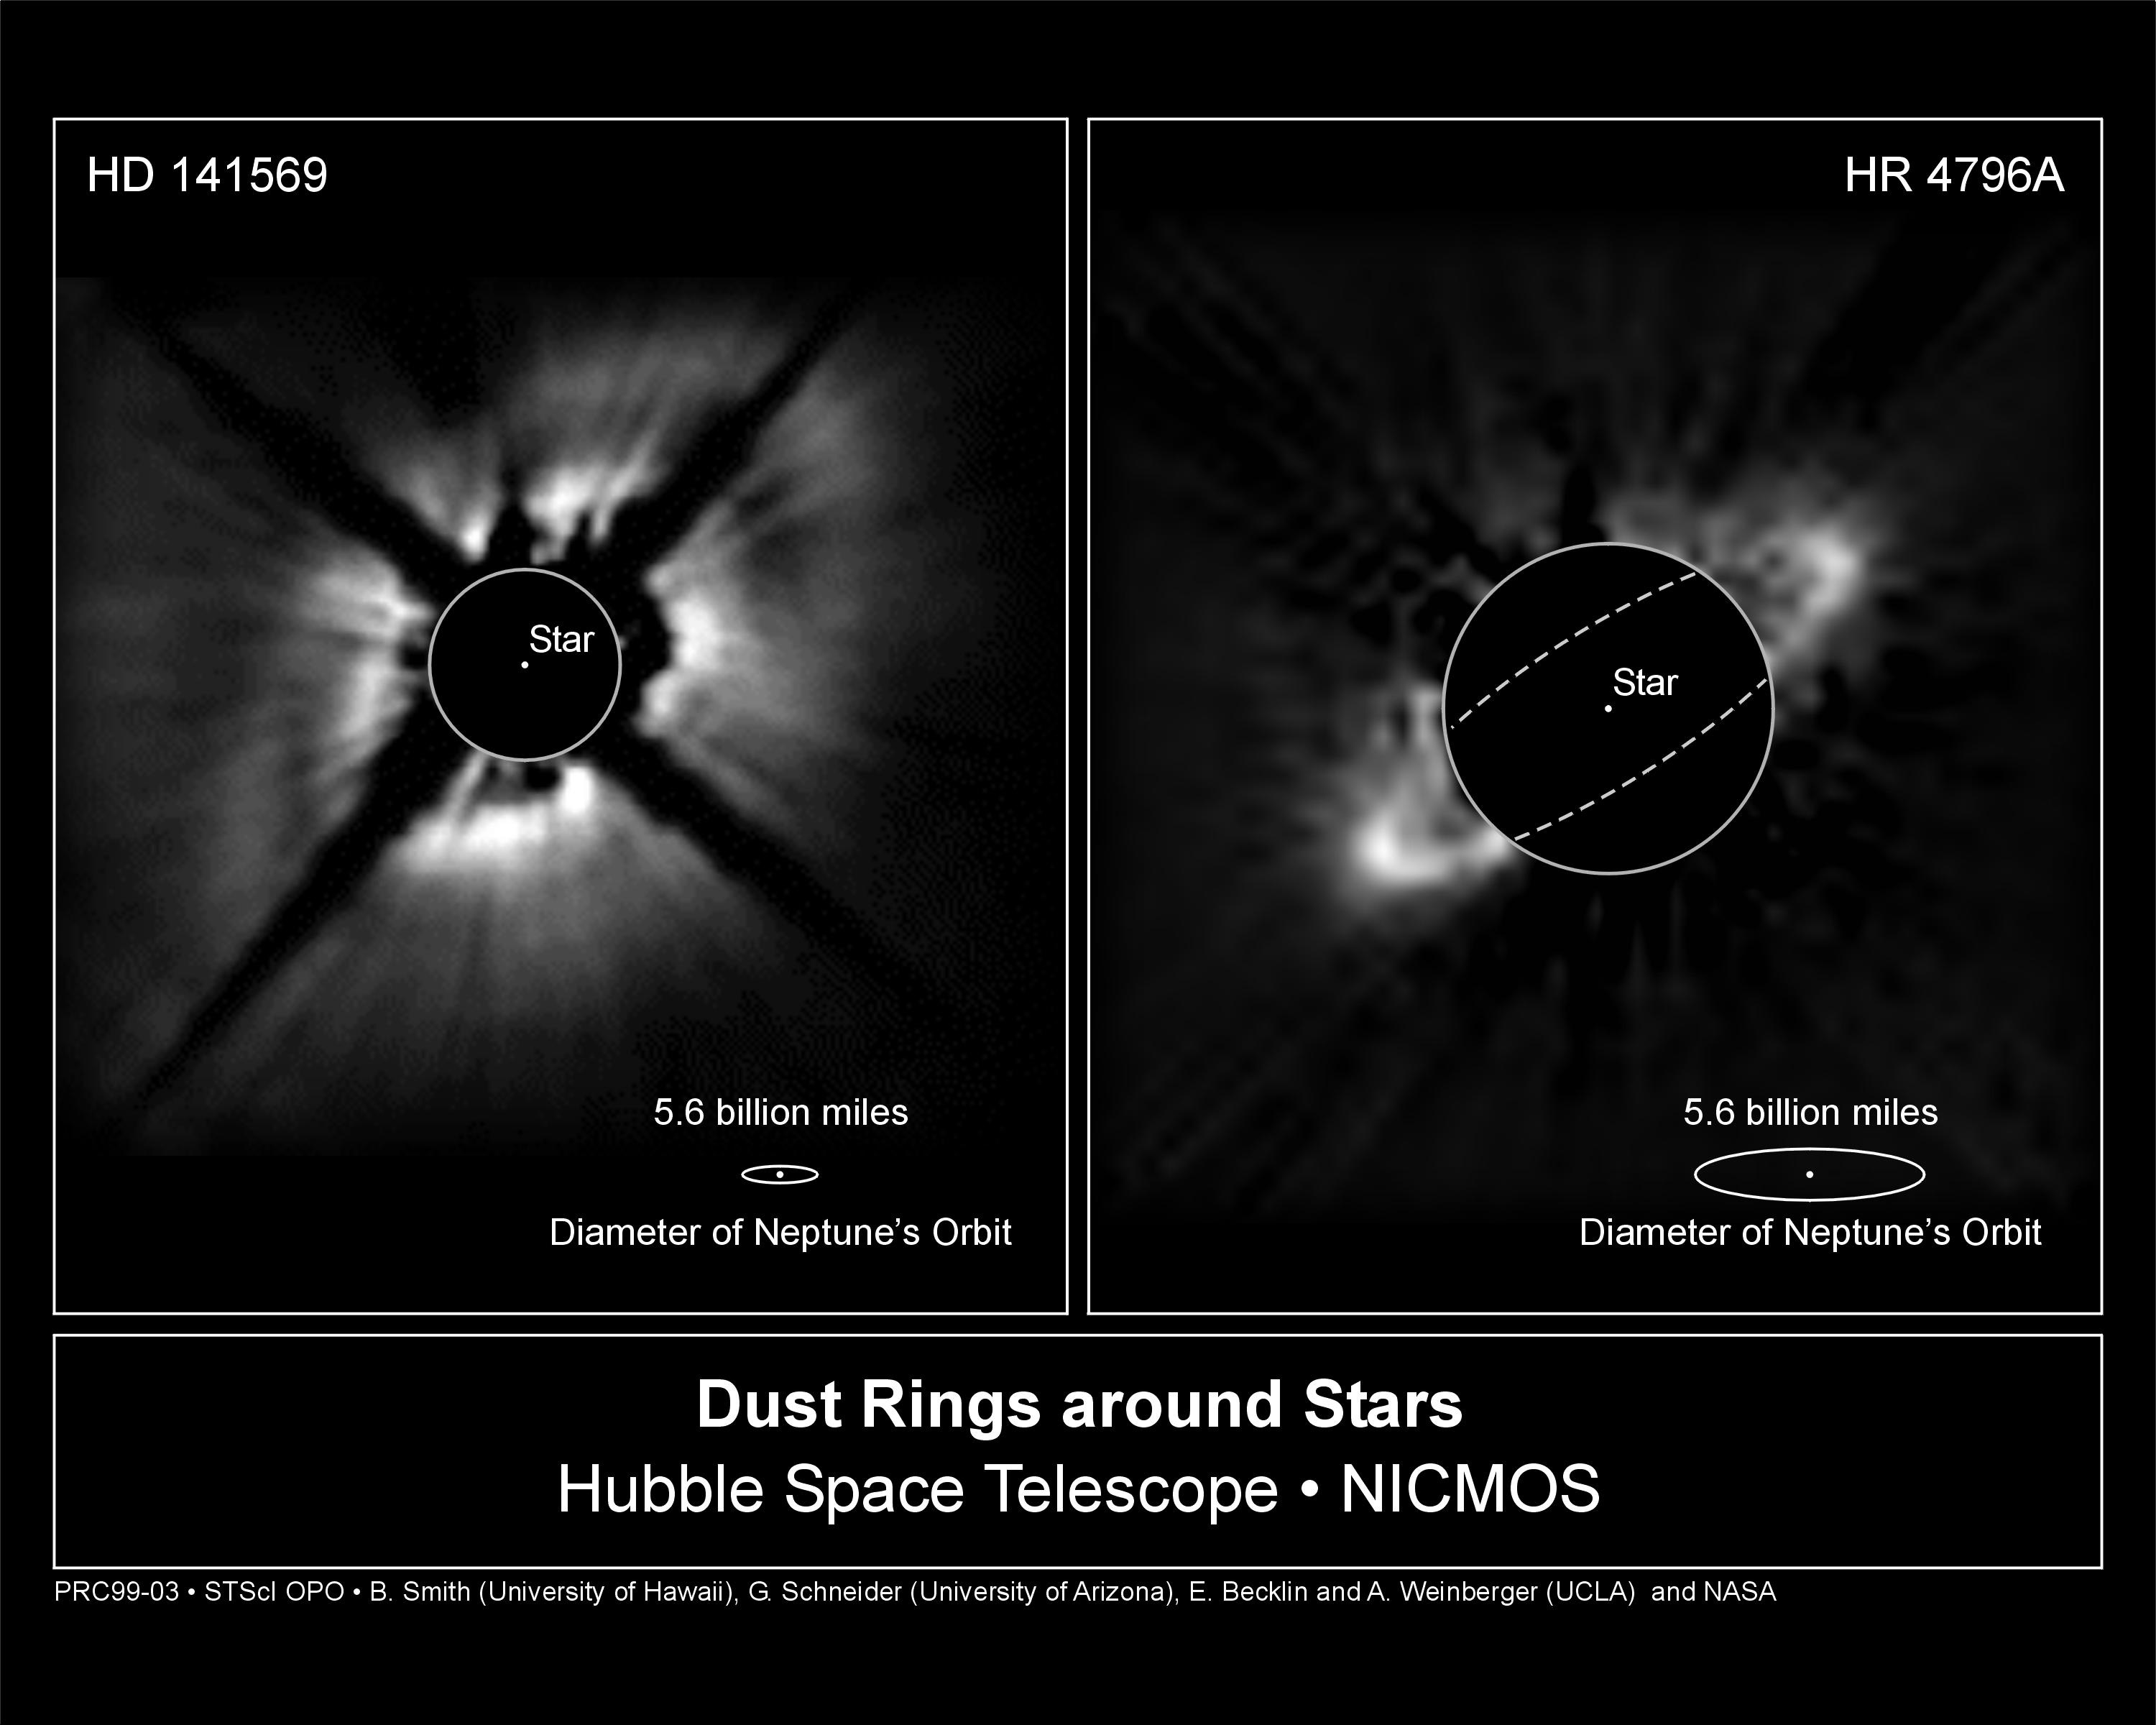

Dust rings around stars

Left Image

A striking NASA/ESA Hubble Space Telescope near-infrared picture of a disk around the star HD 141569, located about 320 light-years away in the constellation Libra. Hubble shows that the 75 billion-mile wide disk seems to come in two parts: a dark band separates a bright inner region from a fainter outer region. The structure superficially looks much like the largest gap in Saturn's rings - but on a vastly larger scale.

Right Image

A NASA/ESA Hubble Space Telescope false-color near infrared image of a novel type of structure seen in space - a dust ring around a star. Superficially resembling Saturn's rings -- but on a vastly larger scale -- the 'hula-hoop' around the star called HR 4796A offers new clues into the possible presence of young planets.

Credit: Left Image: Alycia Weinberger, Eric Becklin (UCLA), Glenn Schneider (University of Arizona) and NASA/ESA., Right Image: Brad Smith (University of Hawaii), Glenn Schneider (University of Arizona), and NASA/ESA.